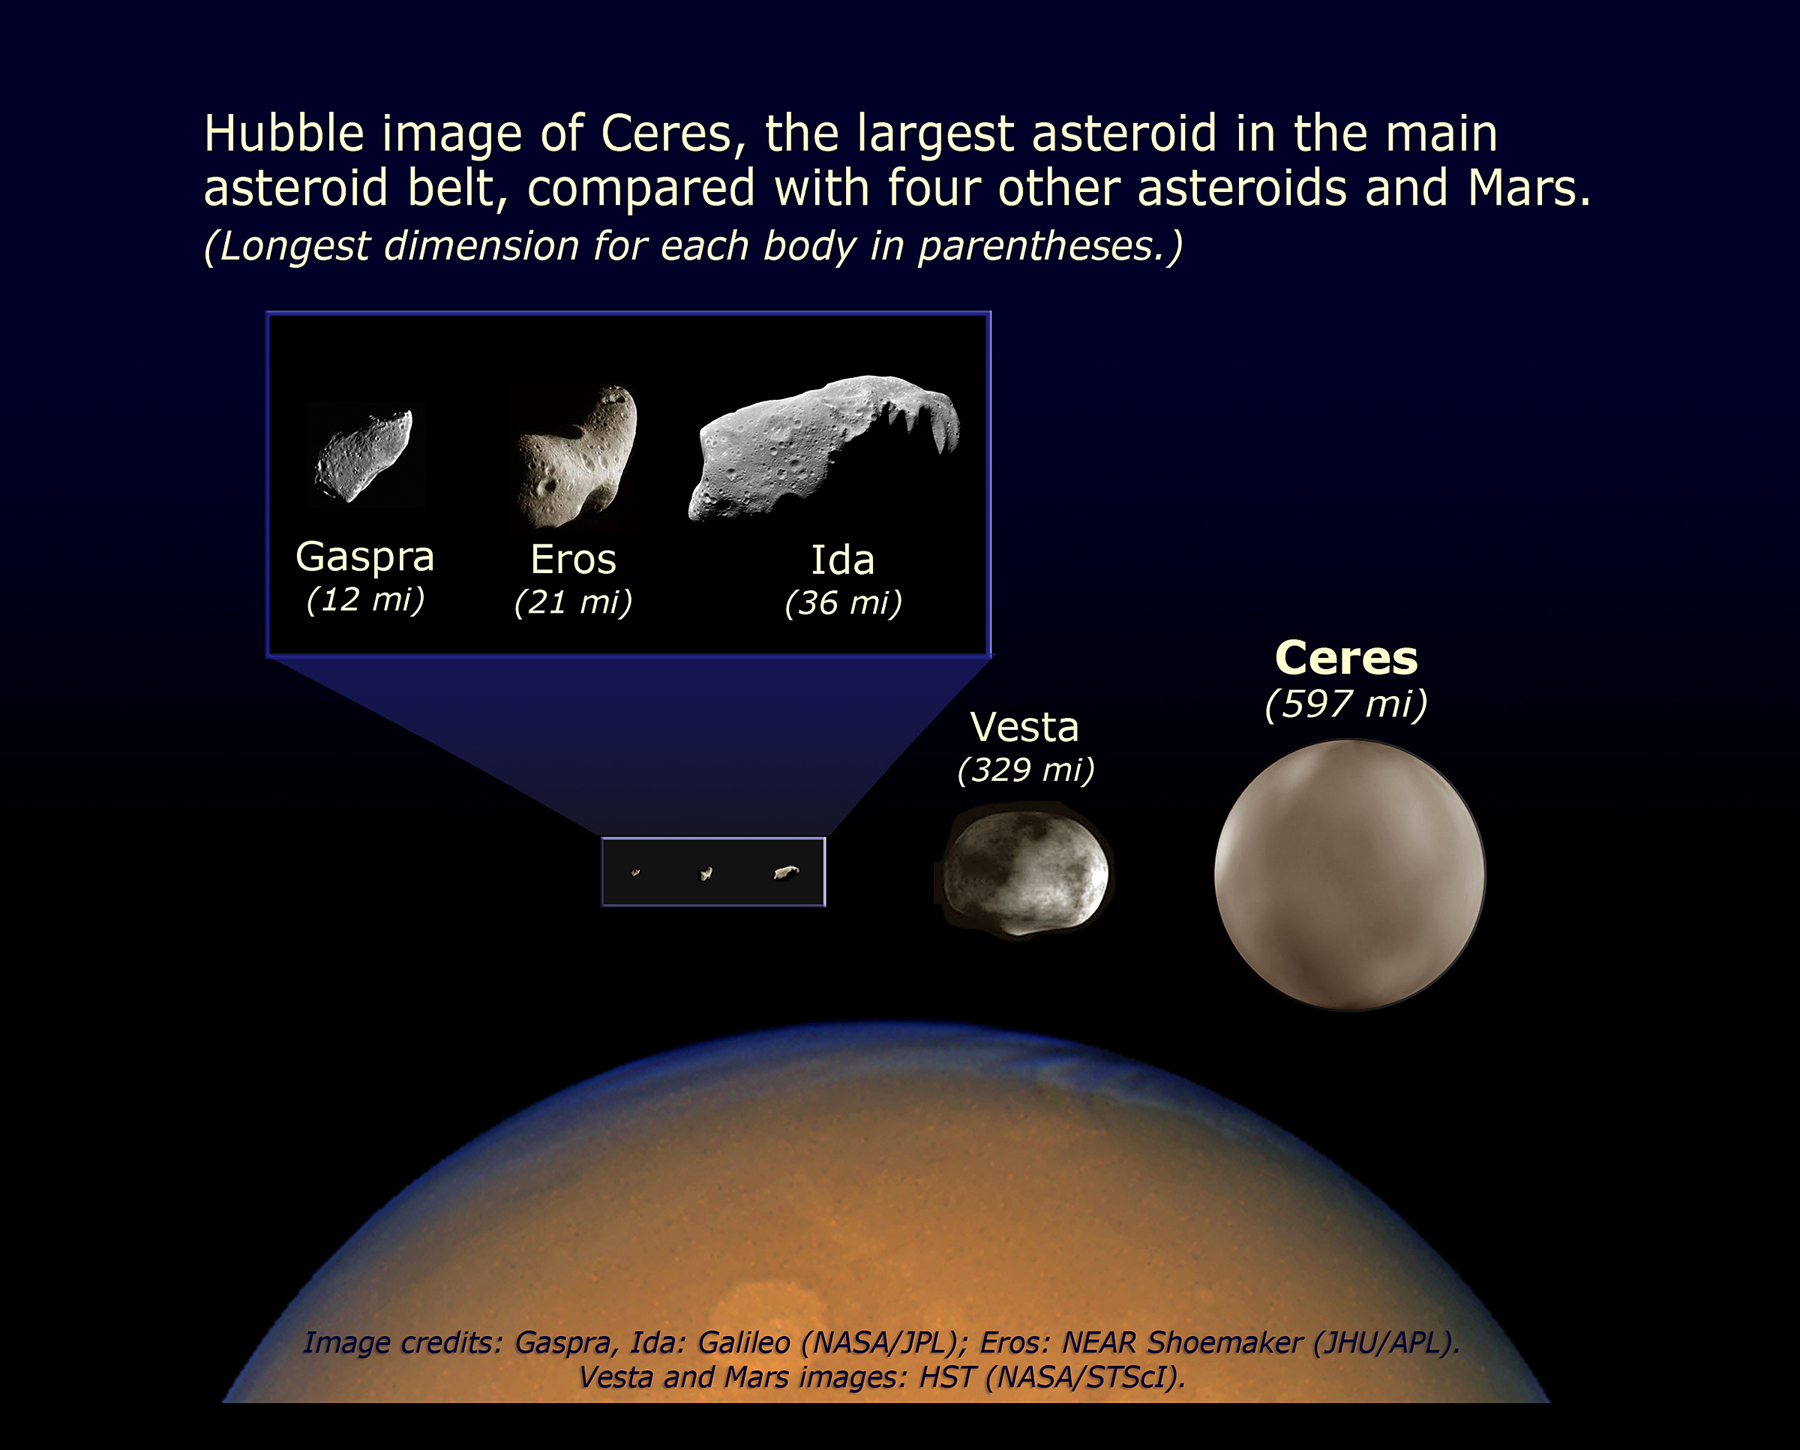

Comparison of asteroid sizes

Hubble image of Ceres, the largest asteroid in the main asteroid belt, compared with four other asteroids (Gaspra, Eros, Ida and Vesta) and Mars.

Credit: NASA, ESA, and A. Feild (STScI)